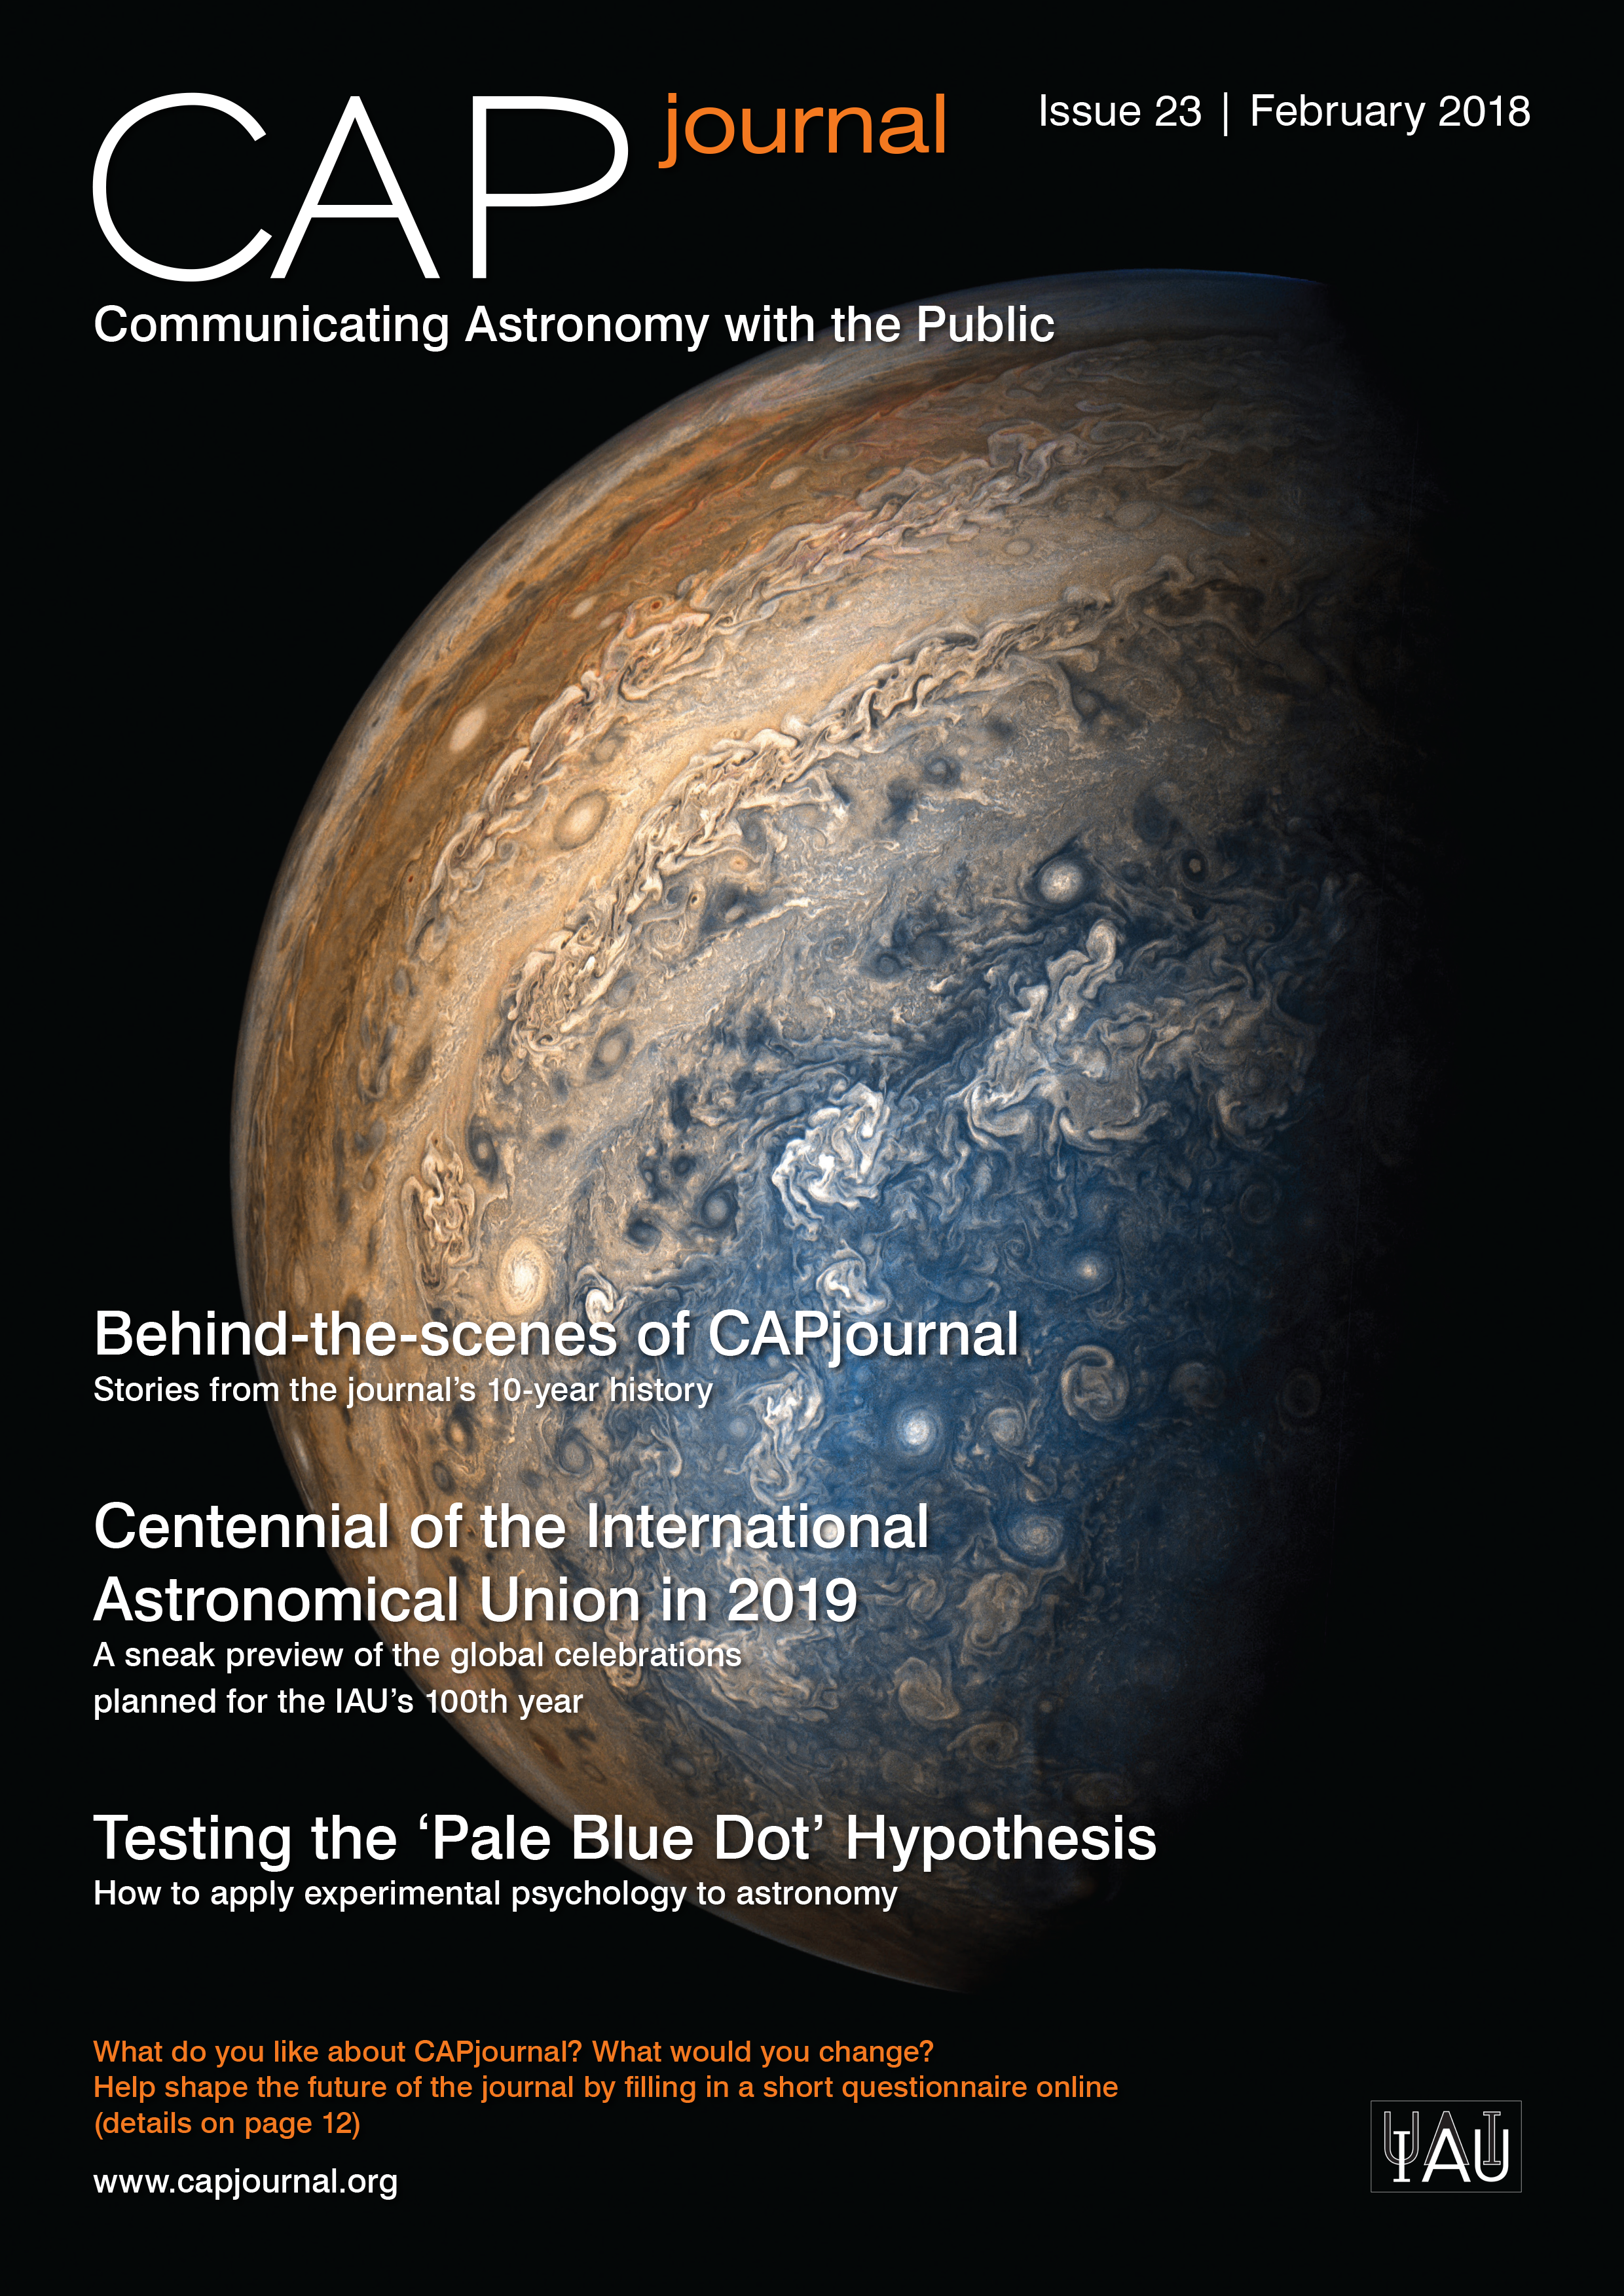

Cover of CAPjournal issue 23

The CAPjournal is a free peer-reviewed journal for astronomy communicators, online and in print. To subscribe to the print or online version please go here: http://www.capjournal.org/subscription.php.
This issue in PDF format is available on: http://www.capjournal.org/issues/23/

Credit: CAPjournal